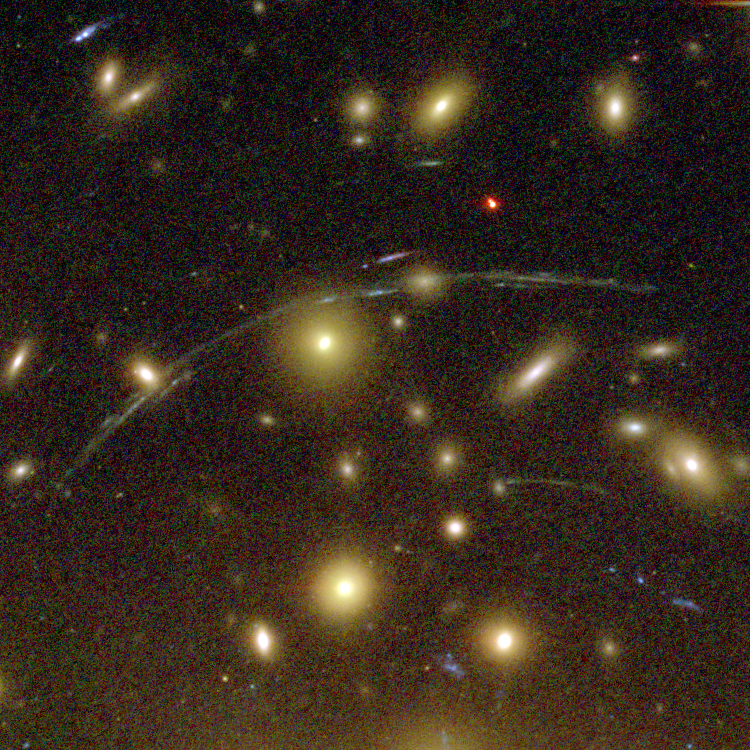

Galaxy Cluster Abell 1689 Details

The Advanced Camera for Surveys (ACS) aboard NASA's Hubble Space Telescope has here used a natural "zoom lens" in space to peer straight through the center of one of the most massive galaxy clusters known, called Abell 1689. Some of the faintest objects in this picture are probably more than 13 billion light-years away.

Credit: NASA, N. Benitez (JHU), T. Broadhurst (The Hebrew University), H. Ford (JHU), M. Clampin(STScI), G. Hartig (STScI), G. Illingworth (UCO/Lick Observatory), the ACS Science Team and ESA